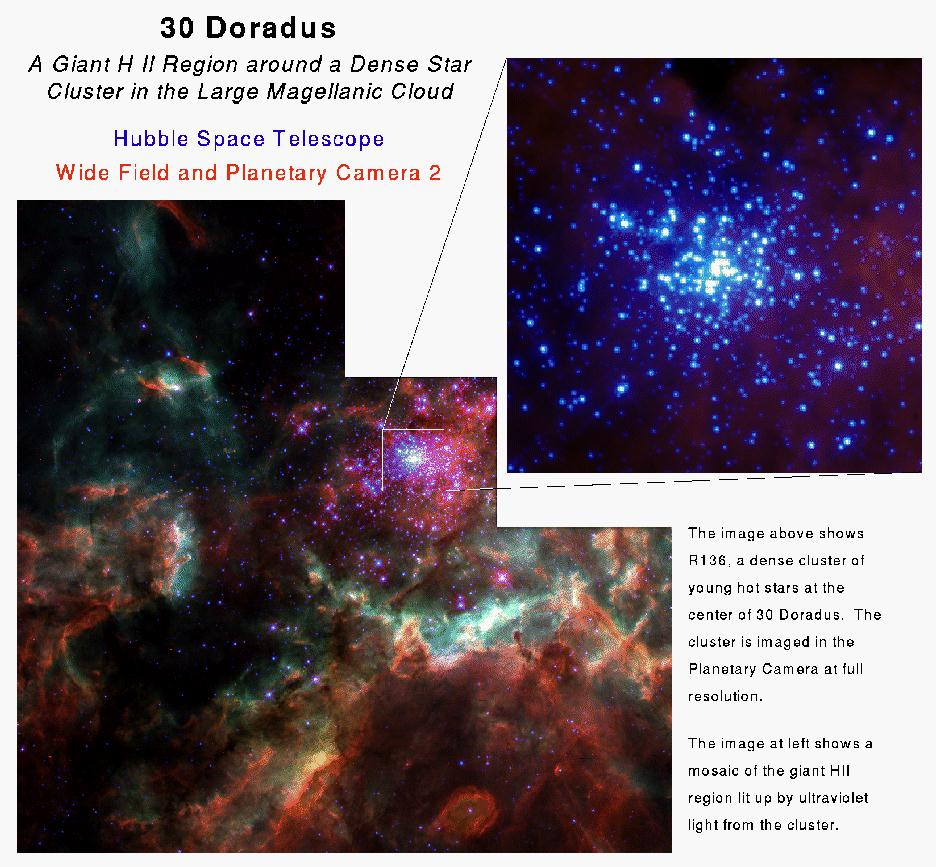

Star Cluster R136

These are images of 30 Doradus. The small picture shows the star cluster R136 that lies in 30 Doradus.

Credit: NASA & ESA